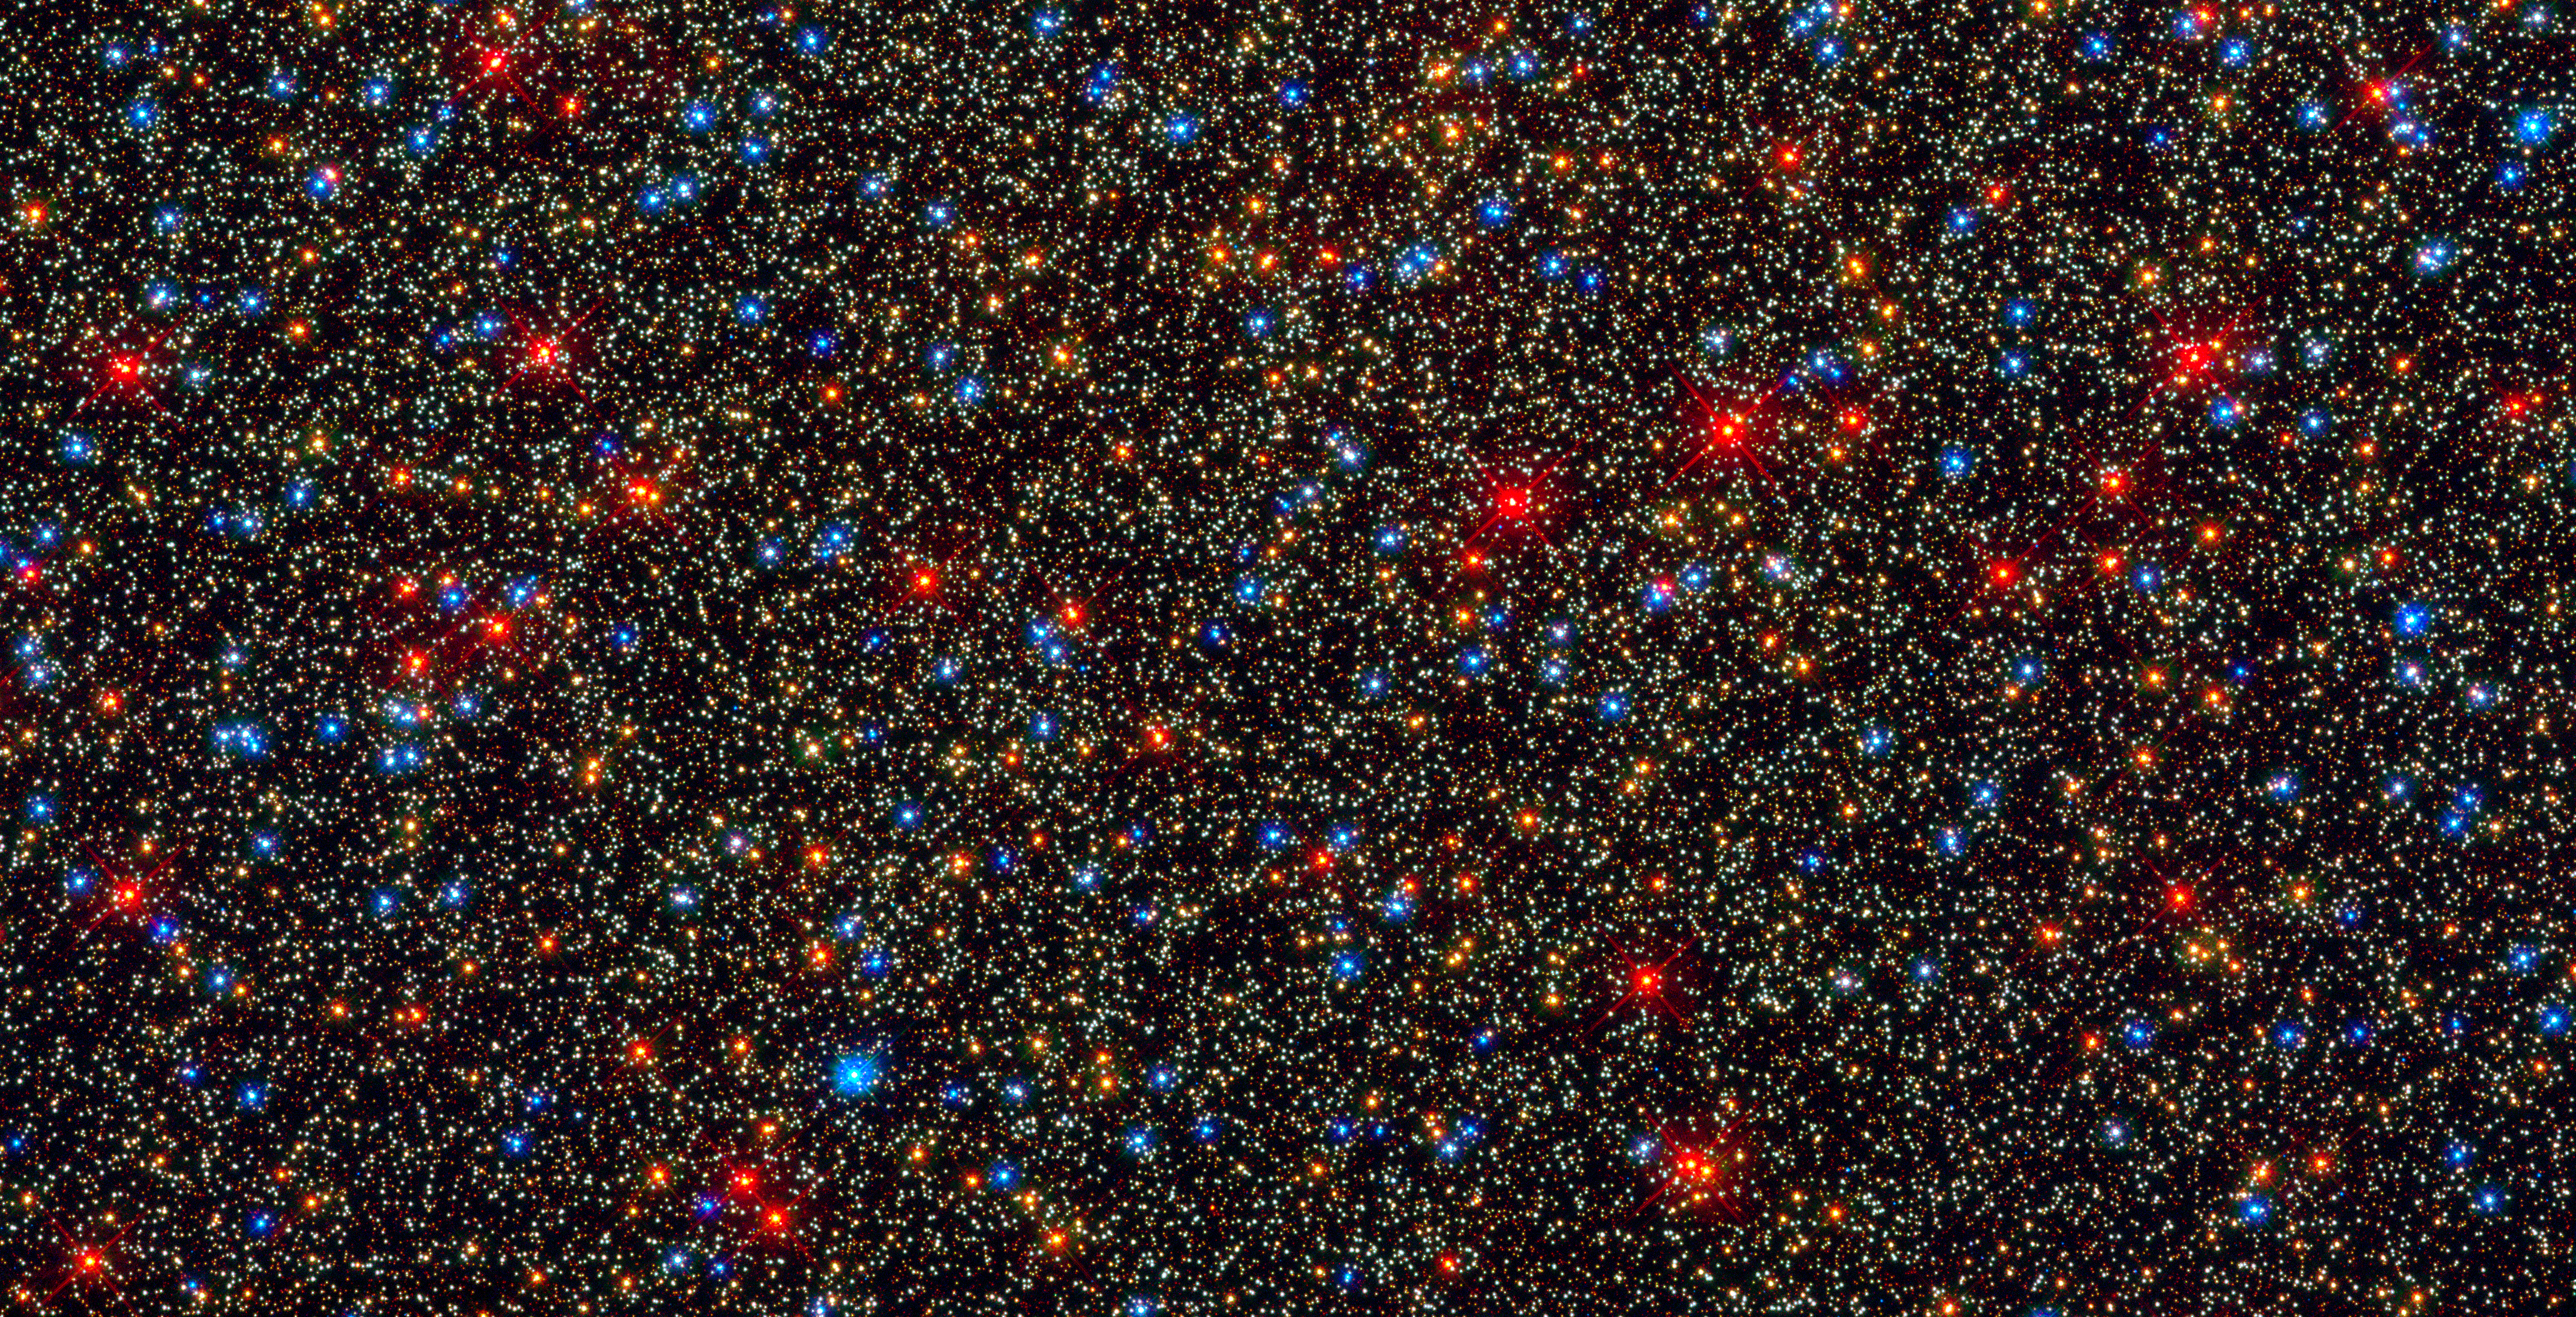

Colourful stars galore inside the globular star cluster Omega Centauri

The NASA/ESA Hubble Space Telescope snapped this panoramic view of a colourful assortment of 100 000 stars residing in the crowded core of a giant star cluster.

The image reveals a small region inside the massive globular cluster Omega Centauri, which boasts nearly 10 million stars. Globular clusters, ancient swarms of stars united by gravity, are almost as old as our Milky Way galaxy. The stars in Omega Centauri are between 10 billion and 12 billion years old. The cluster lies about 16 000 light-years from Earth.

This is one of the first images taken by the new Wide Field Camera 3 (WFC3), installed aboard Hubble in May 2009, during Servicing Mission 4. The camera can snap sharp images over a broad range of wavelengths.

The photograph showcases the camera's colour versatility by revealing a variety of stars in key stages of their life cycles.

The majority of the stars in the image are yellow-white, like our Sun. These are adult stars that are shining by hydrogen fusion. Towards the ends of their normal lives, the stars become cooler and larger. These late-life stars are the orange dots in the image.

Even later in their life cycles, the stars continue to cool down and expand in size, becoming red giants. These bright red stars swell to many times larger than our Sun's size and begin to shed their gaseous envelopes.

After ejecting most of their mass and exhausting much of their hydrogen fuel, the stars appear brilliant blue. Only a thin layer of material covers their super-hot cores. These stars are desperately trying to extend their lives by fusing helium in their cores. At this stage, they emit much of their light at ultraviolet wavelengths.

When the helium runs out, the stars reach the end of their lives. Only their burnt-out cores remain, and they are called white dwarfs (the faint blue dots in the image). White dwarfs are no longer generating energy through nuclear fusion and have gravitationally contracted to the size of Earth. They will continue to cool and grow dimmer for many billions of years until they become dark cinders.

Other stars that appear in the image are known as "blue stragglers". They are older stars that acquire a new lease of life when they collide and merge with other stars. The encounters boost the stars' energy-production rate, making them appear bluer.

All of the stars in the image are cosy neighbours. The average distance between any two stars in the cluster's crowded core is only about a third of a light-year, roughly 13 times closer than our Sun's nearest stellar neighbour, Proxima Centauri. Although the stars are close together, WFC3's sharpness can resolve each of them as individual stars. If anyone lived in this globular cluster, they would behold a star-saturated sky that is roughly 100 times brighter than Earth's sky.

Globular clusters were thought to be assemblages of stars that share the same birth date. Evidence suggests, however, that Omega Centauri has at least two populations of stars with different ages. Some astronomers think that the cluster may be the remnant of a small galaxy that was gravitationally disrupted long ago by the Milky Way, losing stars and gas.

Omega Centauri is among the biggest and most massive of some 200 globular clusters orbiting the Milky Way. It is one of the few globular clusters that can be seen with the unaided eye. Named by Johann Bayer in 1603 as the 24th brightest object in the constellation of Centaurus, it resembles a small cloud in the southern sky and might easily be mistaken for a comet.

Hubble observed Omega Centauri on 15 July 2009, in ultraviolet and visible light. These Hubble observations of Omega Centauri are part of the Hubble Servicing Mission 4 Early Release Observations.

Credit: NASA, ESA and the Hubble SM4 ERO Team